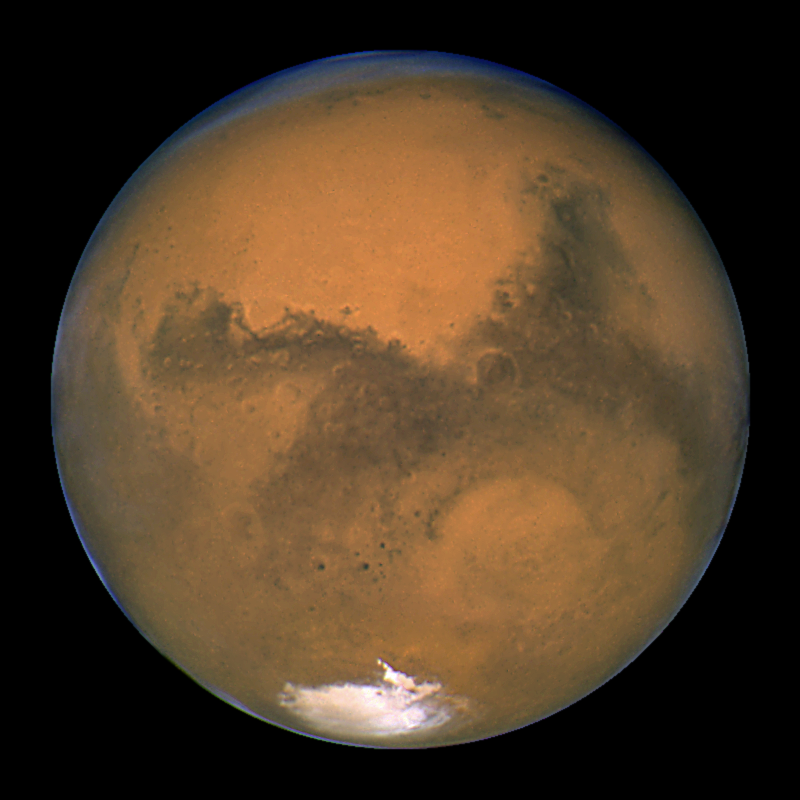

Hubble's Closest View of Mars

NASA/ESA Hubble Space Telescope snapped this portrait of Mars within minutes of the planet's closest approach to Earth in nearly 60,000 years. This image was made from a series of exposures taken between 5:35 a.m. and 6:20 a.m. EDT Aug. 27 with Hubble's Wide Field and Planetary Camera 2. In this picture, the red planet is 34,647,420 miles (55,757,930 km) from Earth.

This sharp, natural-color view of Mars reveals several prominent Martian features, including the largest volcano in the solar system, Olympus Mons; a system of canyons called Valles Marineris; an immense dark marking called Solis Lacus; and the southern polar ice cap.

Credit: NASA/ESA, J. Bell (Cornell U.) and M. Wolff (SSI)